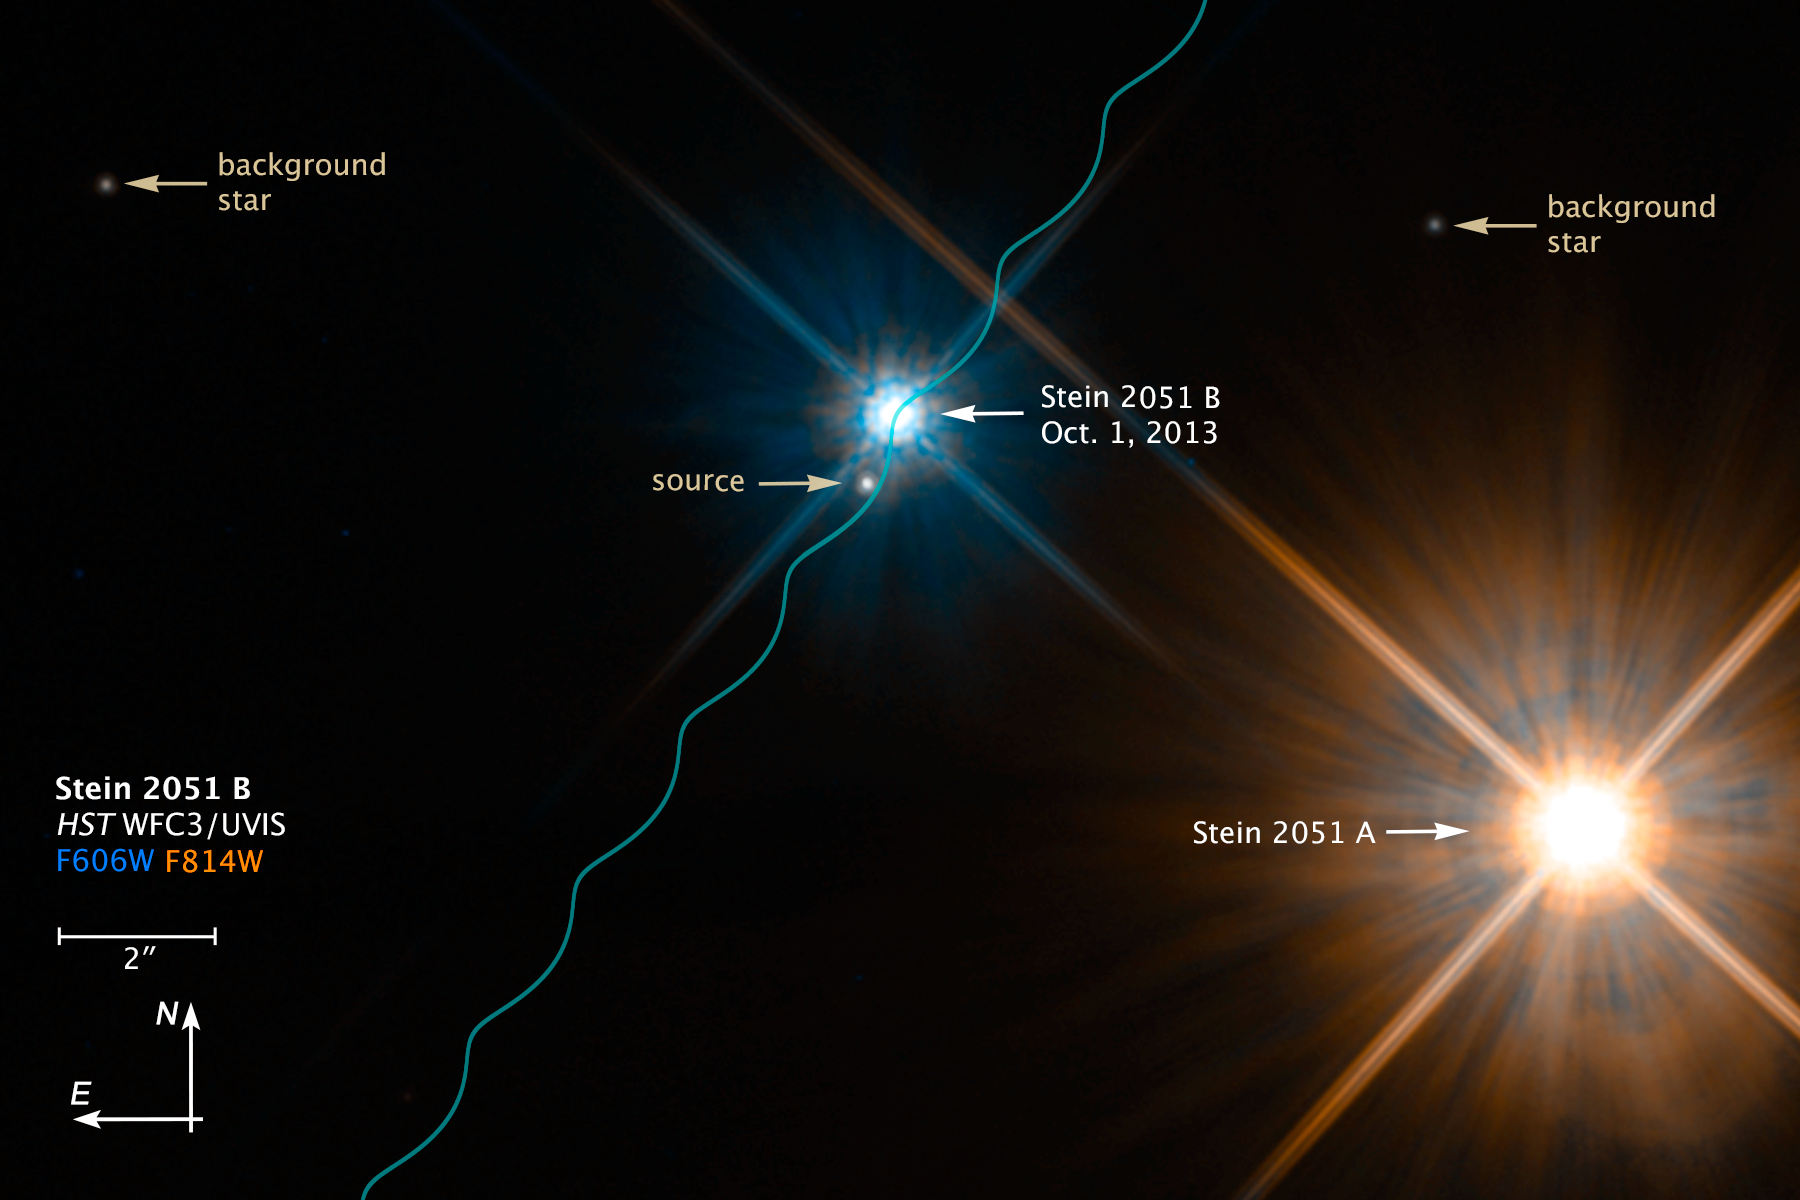

Binary star system Stein 2051 (annotated)

This NASA/ESA Hubble Space Telescope image shows the binary star system Stein 2051 on October 1, 2013, consisting of the brighter, redder "A" component at lower right and the fainter, bluer "B" component near the centre, a white dwarf star. Because these stars are only 17 light-years away they appear to move in the sky relative to the much more distant background stars in several months of observations with Hubble. The wavy blue line traces this motion, due to their true motion relative to the Sun combined with the parallax due to the motion of Earth around the Sun. Stein 2051 B appeared to pass close enough to one of these background stars, labeled "source" that the light from the background star was bent due to the mass of the white dwarf. This colour image was made by combining images taken in two filters with Hubble's Wide Field Camera 3.

Credit: NASA, ESA, and K. Sahu (STScI)